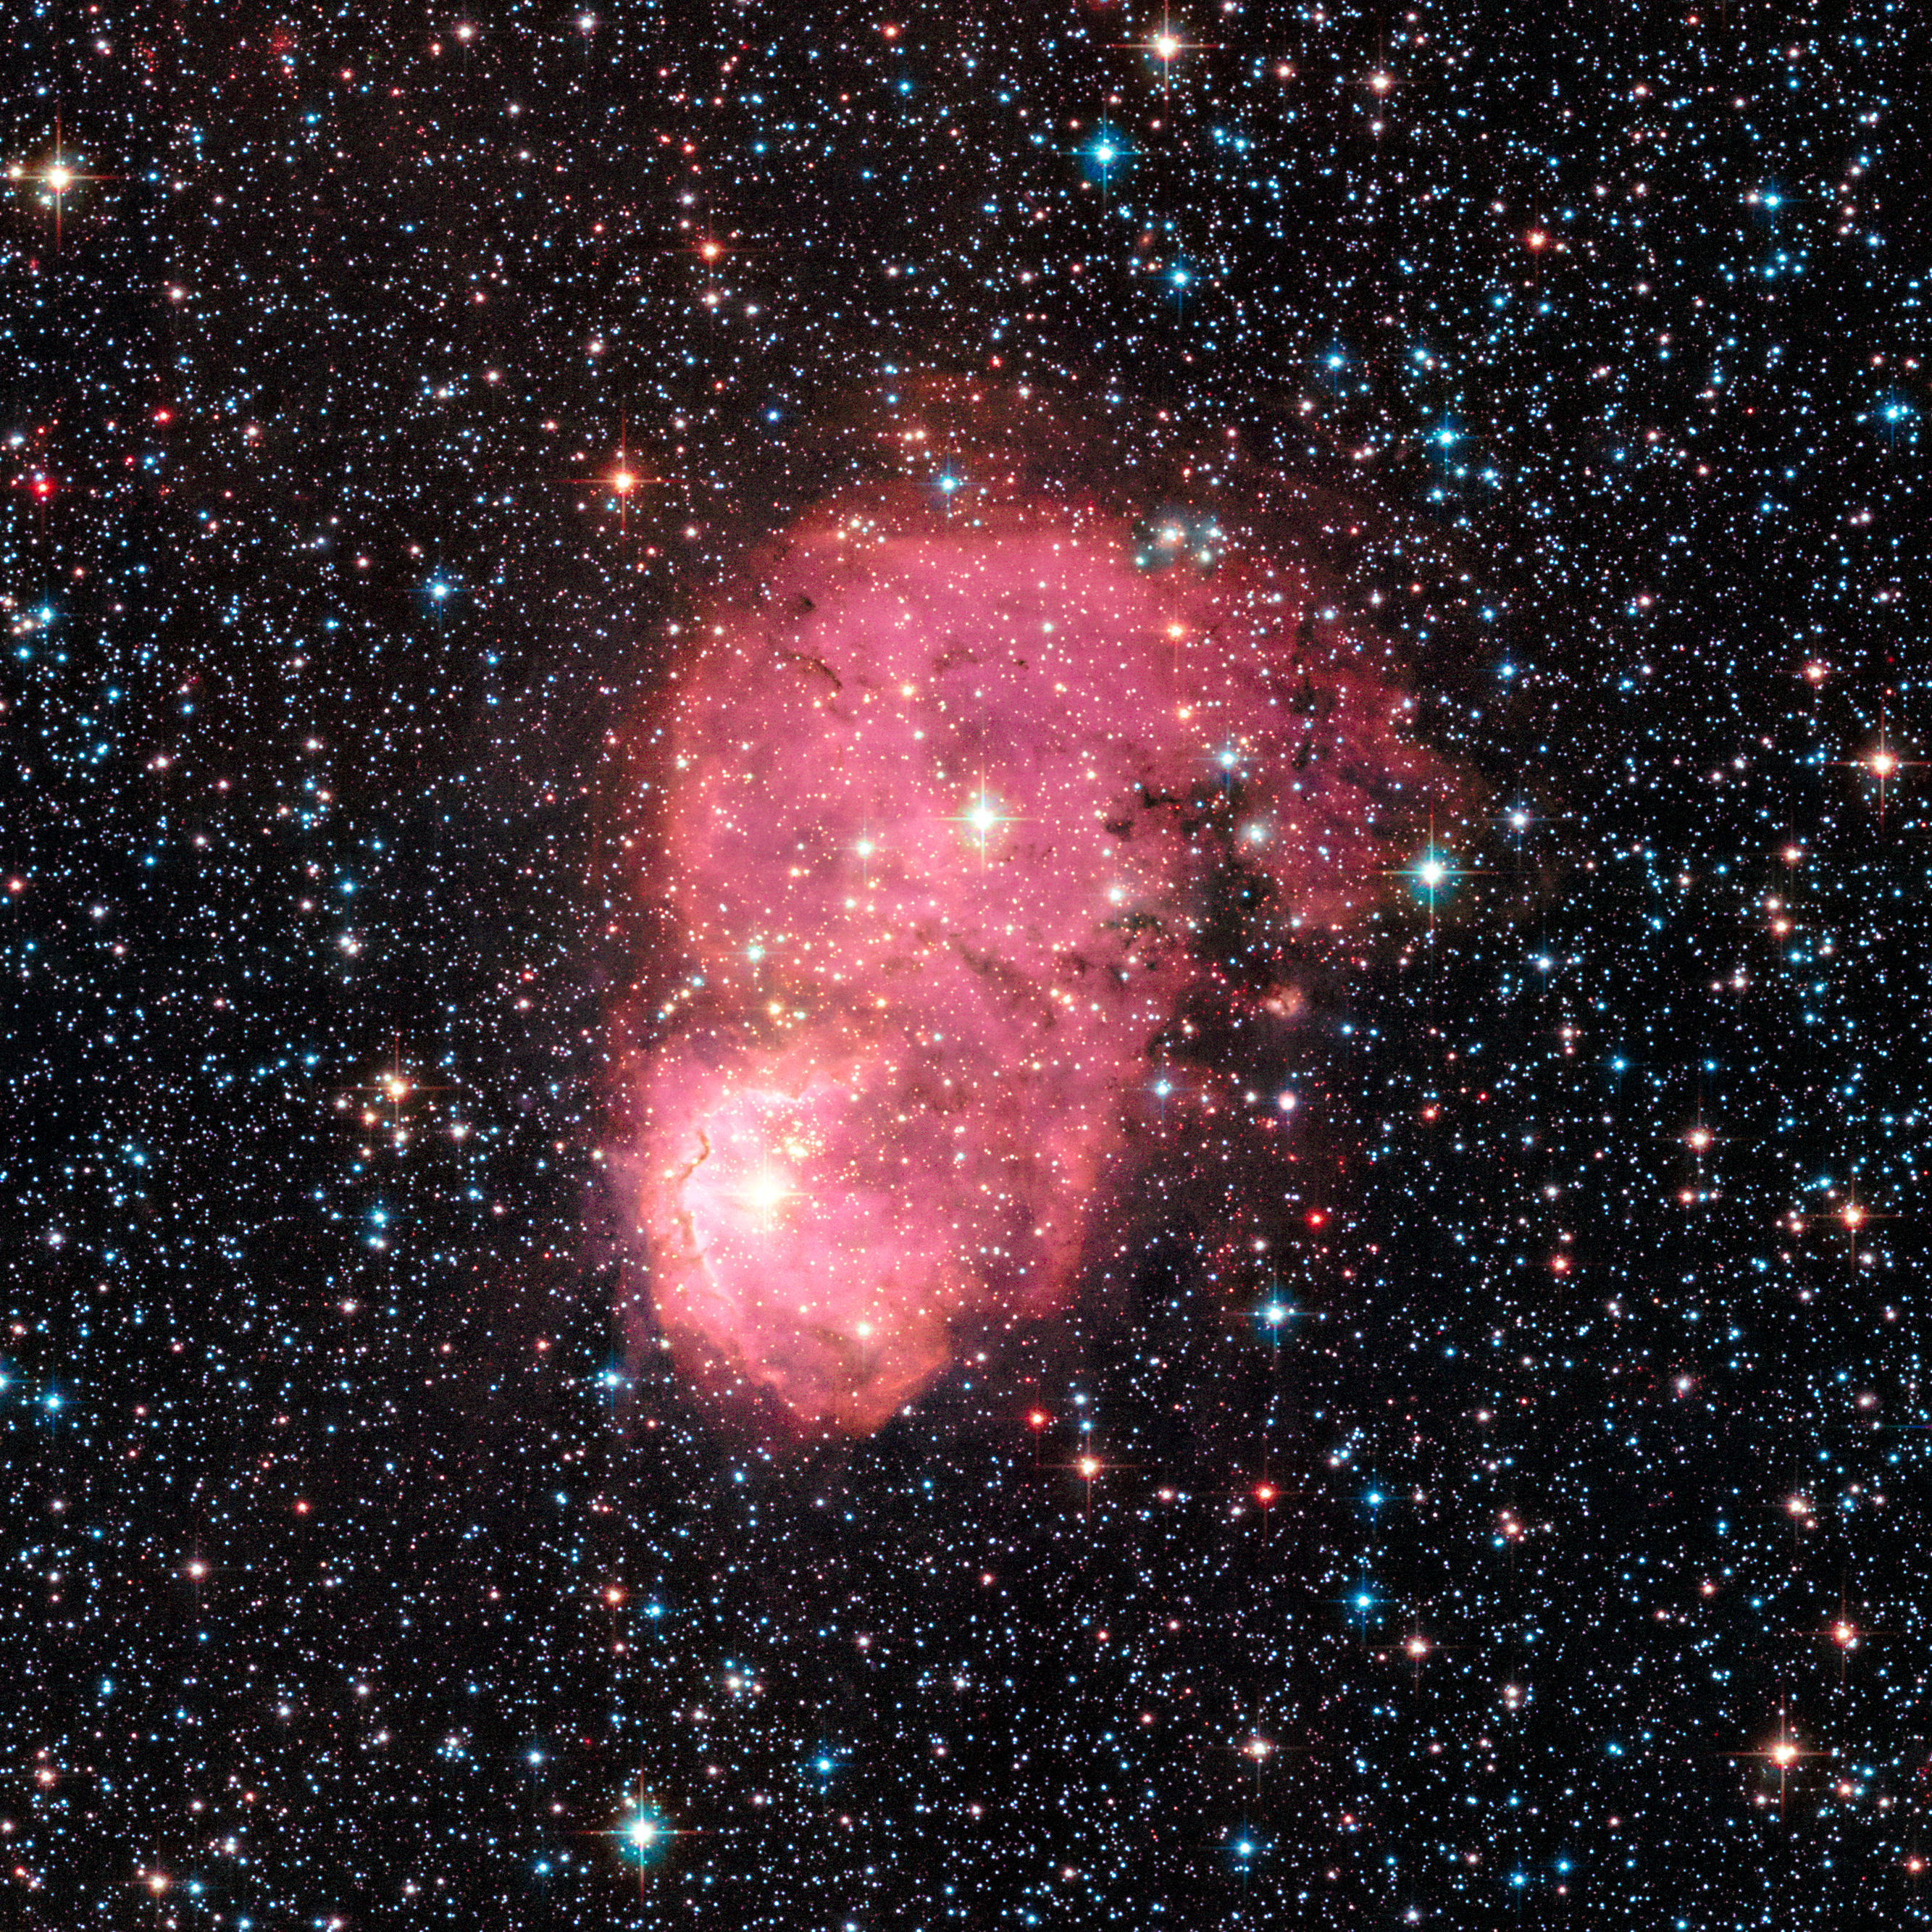

Festive nebulae

This glowing nebula, named NGC 248, is located within the Small Magellanic Cloud, a satellite galaxy of the Milky Way and about 200 000 light-years from Earth. The nebula was observed with Hubble’s Advanced Camera for Surveys in September 2015, as part of a survey called the Small Magellanic cloud Investigation of Dust and Gas Evolution (SMIDGE).

Credit: NASA, ESA, STScI, K. Sandstrom (University of California, San Diego), and the SMIDGE team.